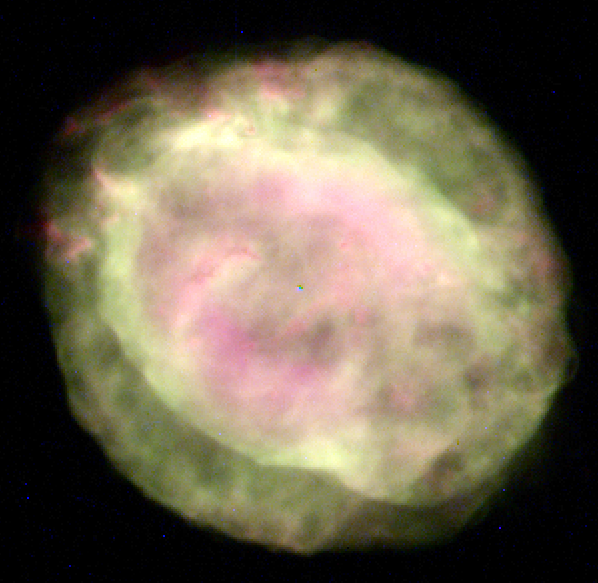

Planetary nebula NGC 6818

This Wide Field and Planetary Camera 2image of NGC 6818 shows two distinct layers of gas (with dust): a spherical outer region and a brighter, vase-shaped interior 'bubble.' Astronomers believe that a fast wind - material propelled by radiation from the hot central star - is creating the inner elongated shape. The central star of the planetary nebula appears as a tiny blue dot. The material in the wind is traveling so fast that it smashes through older, slower-moving stellar debris, causing a 'blowout' at both ends of the bubble (lower right and upper left).

Credit: Robert Rubin (NASA/ESA Ames Research Center), Reginald Dufour and Matt Browning (Rice University), Patrick Harrington (University of Maryland), and NASA/ESA